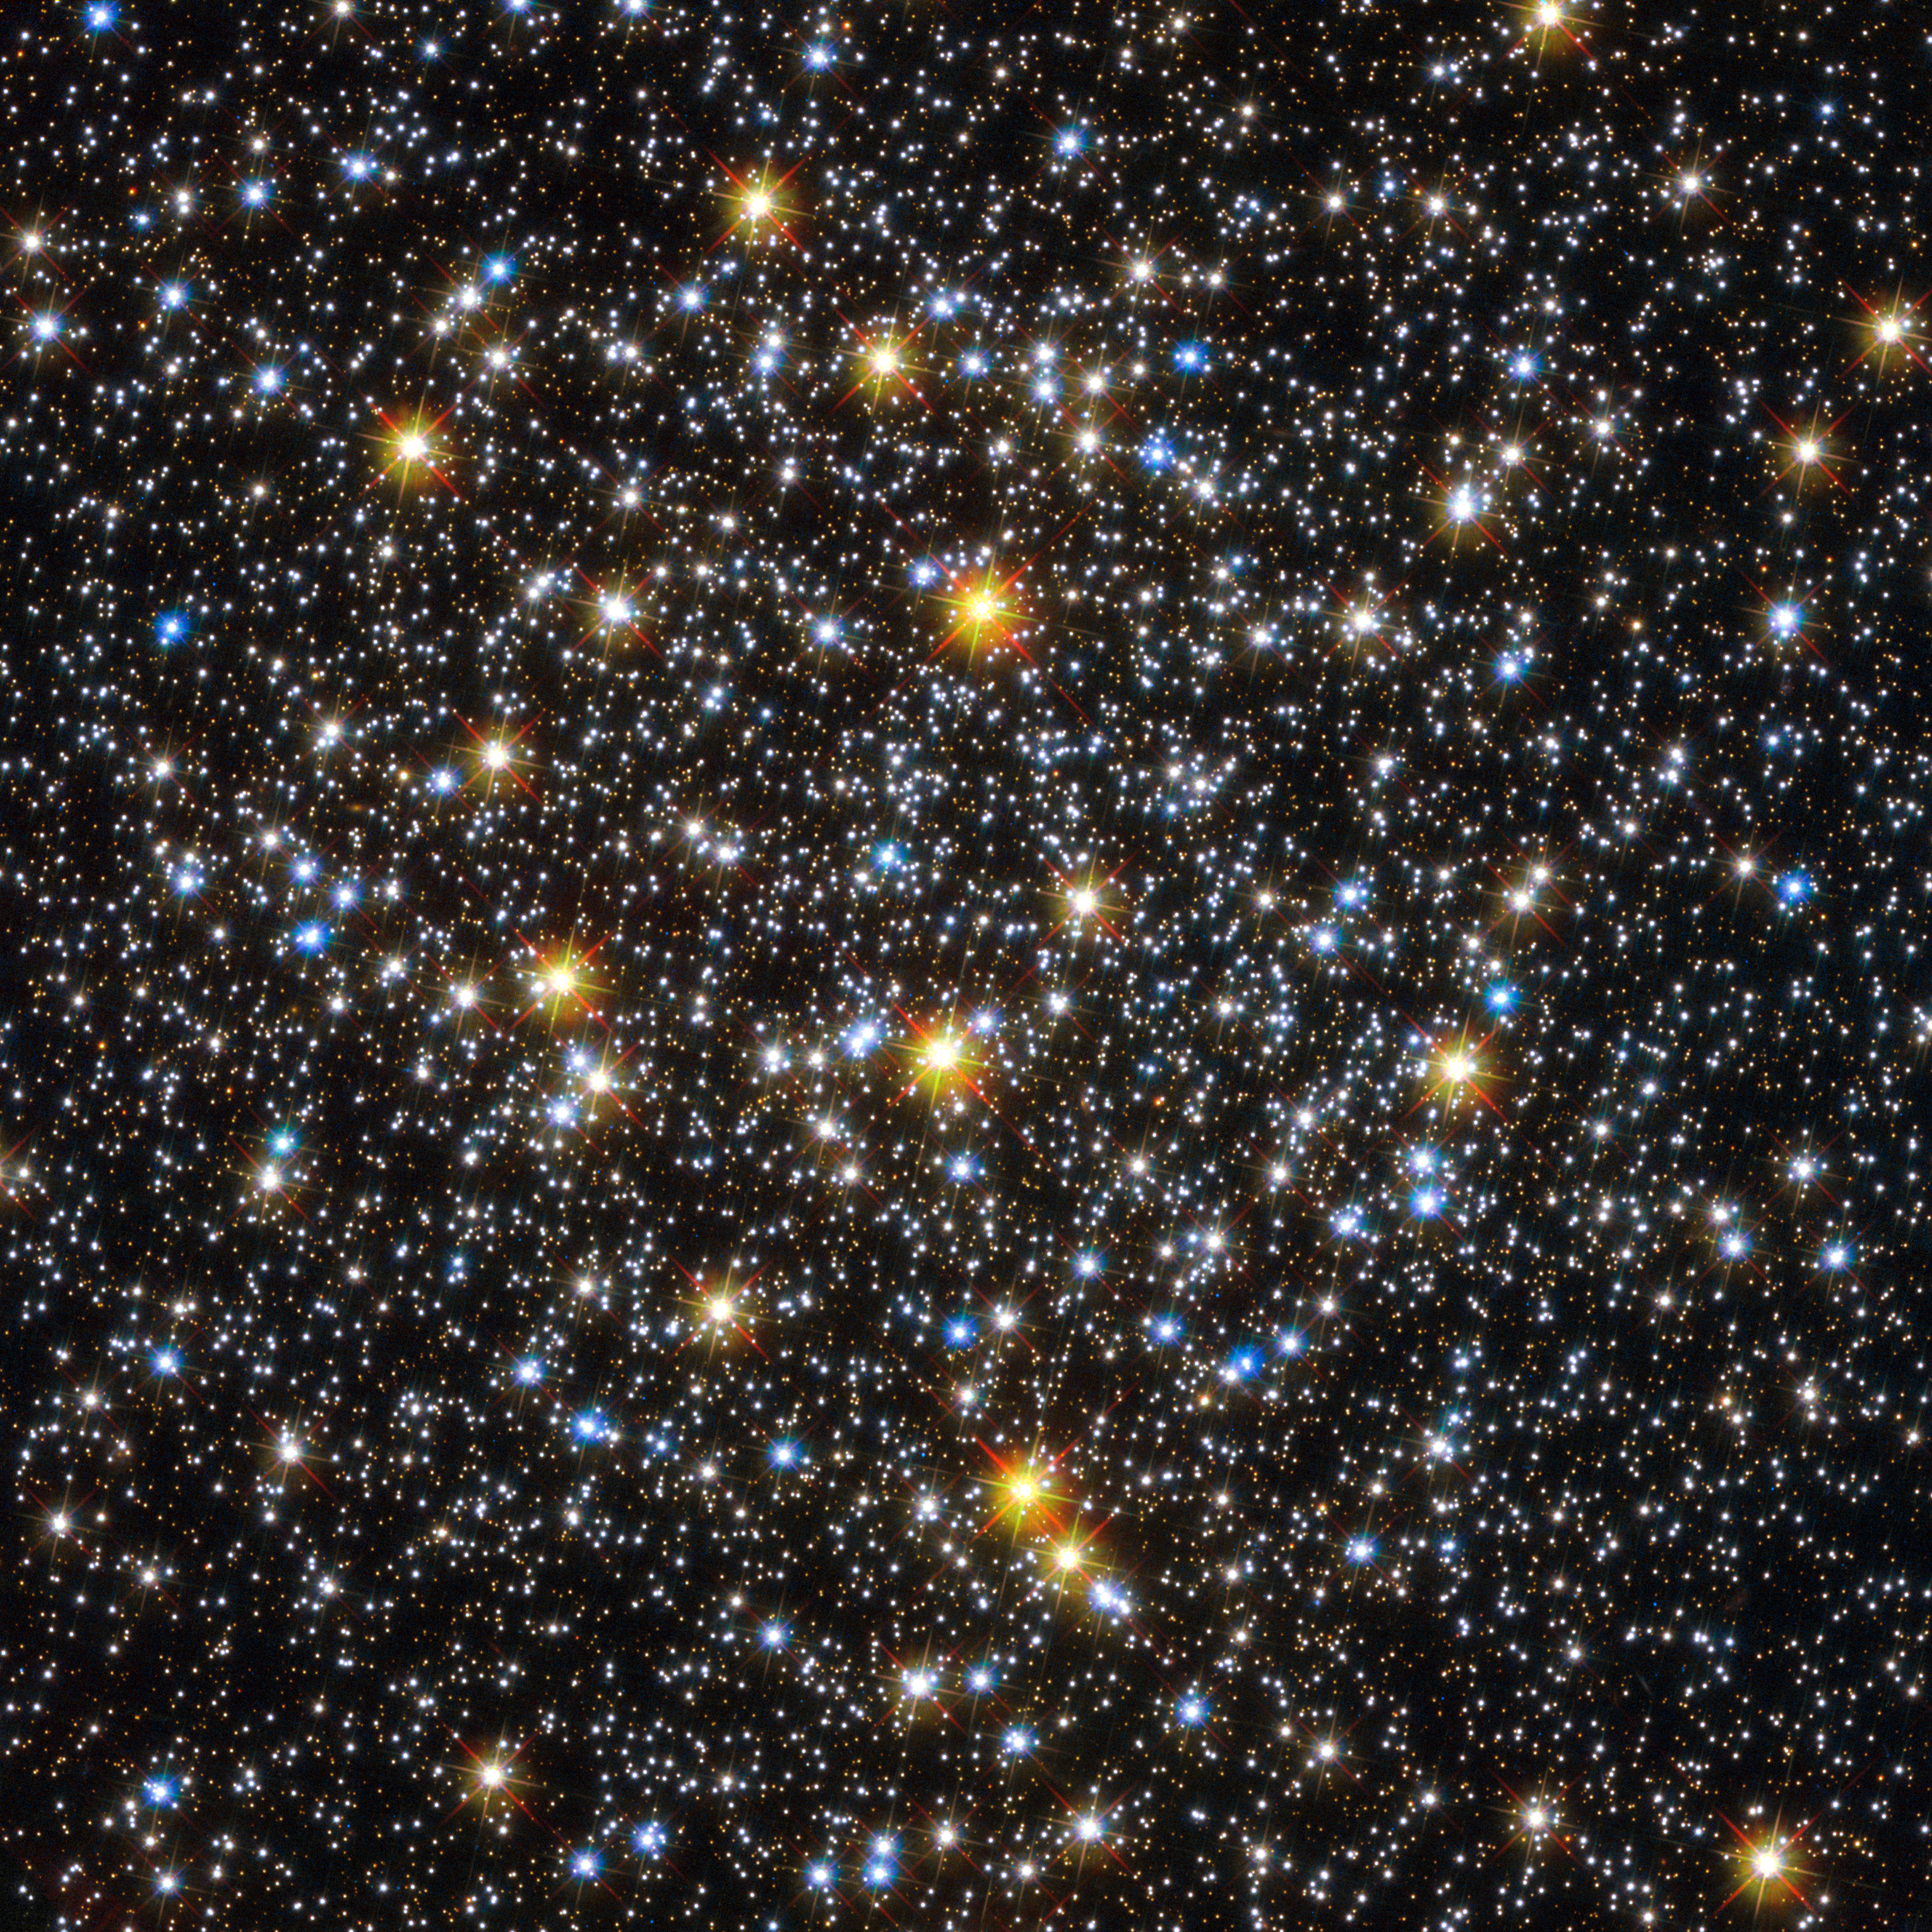

An unexpected population of young-looking stars

The NASA/ESA Hubble Space Telescope offers an impressive view of the centre of globular cluster NGC 6362. The image of this spherical collection of stars takes a deeper look at the core of the globular cluster, which contains a high concentration of stars with different colours.

Tightly bound by gravity, globular clusters are composed of old stars, which, at around 10 billion years old, are much older than the Sun. These clusters are fairly common, with more than 150 currently known in our galaxy, the Milky Way, and more which have been spotted in other galaxies.

Globular clusters are among the oldest structures in the Universe that are accessible to direct observational investigation, making them living fossils from the early years of the cosmos.

Astronomers infer important properties of globular clusters by looking at the light from their constituent stars. For many years, they were regarded as ideal laboratories for testing the standard stellar evolution theory. Among other things, this theory suggests that most of the stars within a globular cluster should be of a similar age.

Recently, however, high precision measurements performed in numerous globular clusters, primarily with the Hubble Space Telescope, has led some to question this widely accepted theory. In particular, certain stars appear younger and bluer than their companions, and they have been dubbed blue stragglers. NGC 6362 contains many of these stars.

Since they are usually found in the core regions of clusters, where the concentration of stars is large, the most likely explanation for this unexpected population of objects seems to be that they could be either the result of stellar collisions or transfer of material between stars in binary systems. This influx of new material would heat up the star and make it appear younger than its neighbours.

NGC 6362 is located about 25 000 light-years from Earth in the constellation of Ara (The Altar). British astronomer James Dunlop first observed this globular cluster on 30 June 1826.

This image was created combining ultraviolet, visual and infrared images taken with the Wide Field Channel of the Advanced Camera for Surveys and the Wide Field Camera 3. An image image of NGC 6362 taken by the MPG/ESO 2.2-metre telescope will be published by the European Southern Observatory on Wednesday. See it on www.eso.org from 12:00 on 31 October.

Credit: ESA/Hubble & NASA